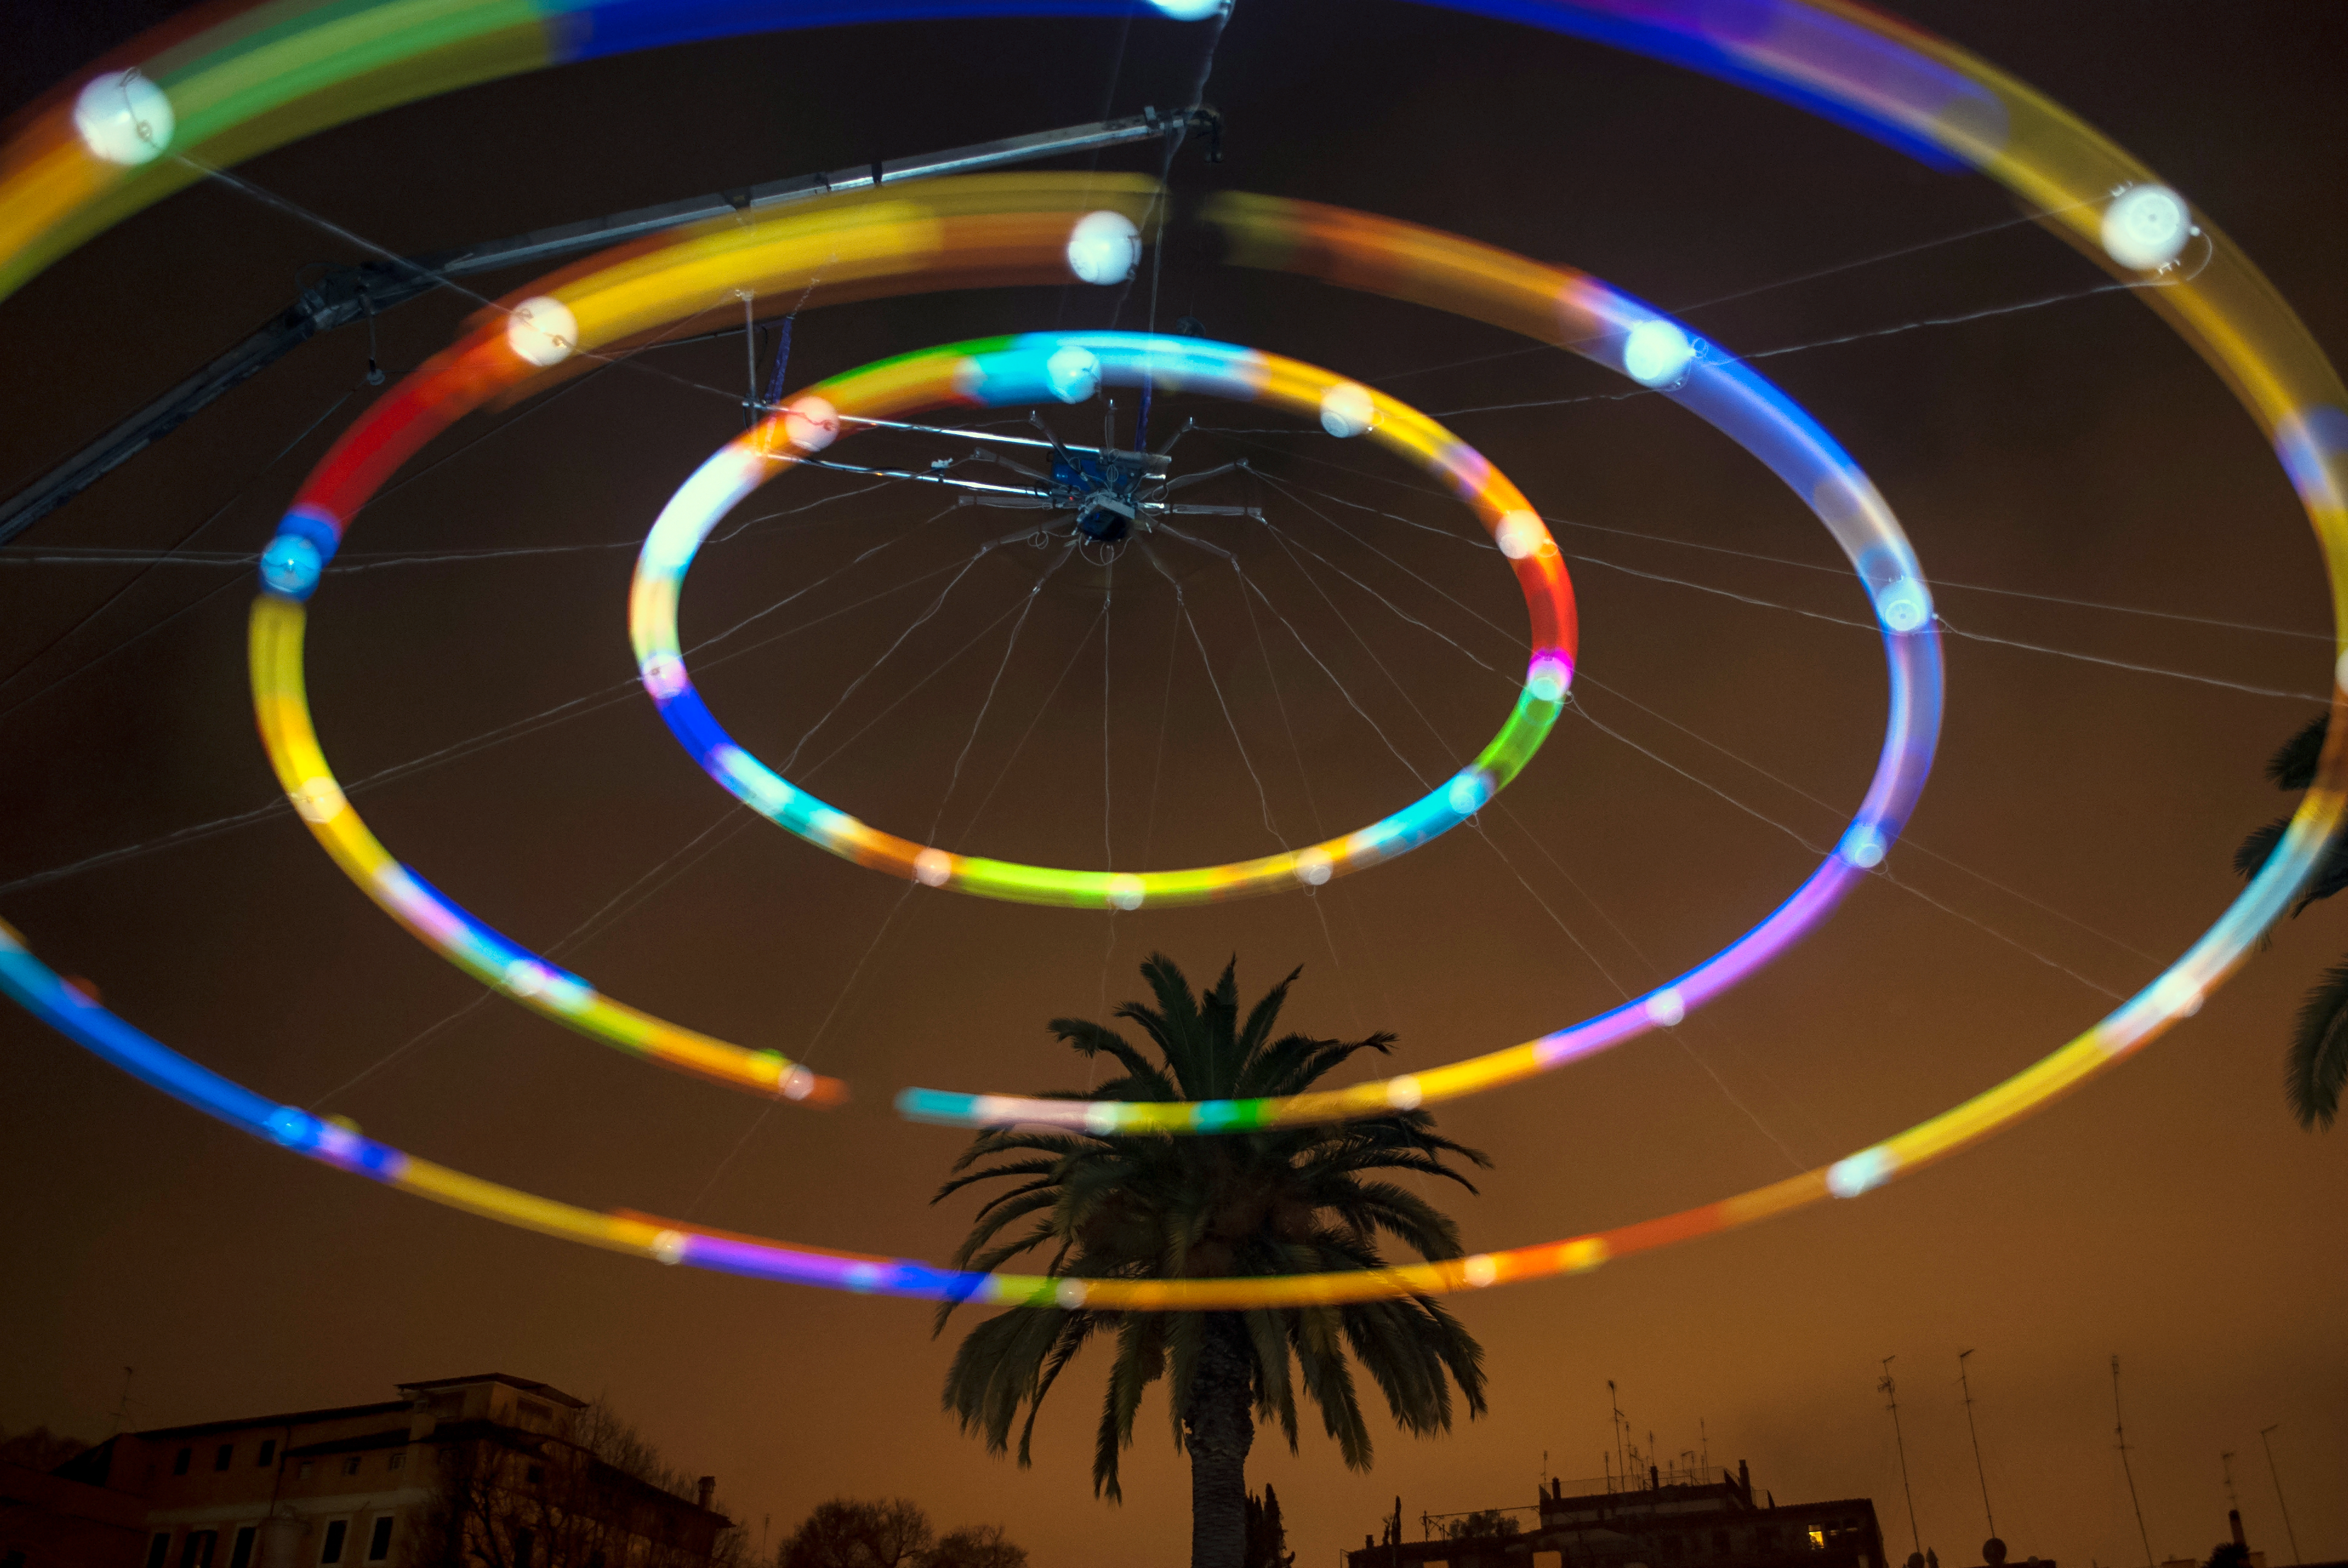

Heaven’s Carousel

This installation, named Heaven’s Carousel, links together the fields of art, music and astronomy. Conceptualised and designed by German artist and composer Tim Otto Roth, the work is inspired by novel work on the accelerating expansion of the Universe by Nobel laureate Adam Riess (STScl), Greek cosmology and Renaissance astronomers.

Credit: NASA, ESA, and Pam Jeffries (STScI)